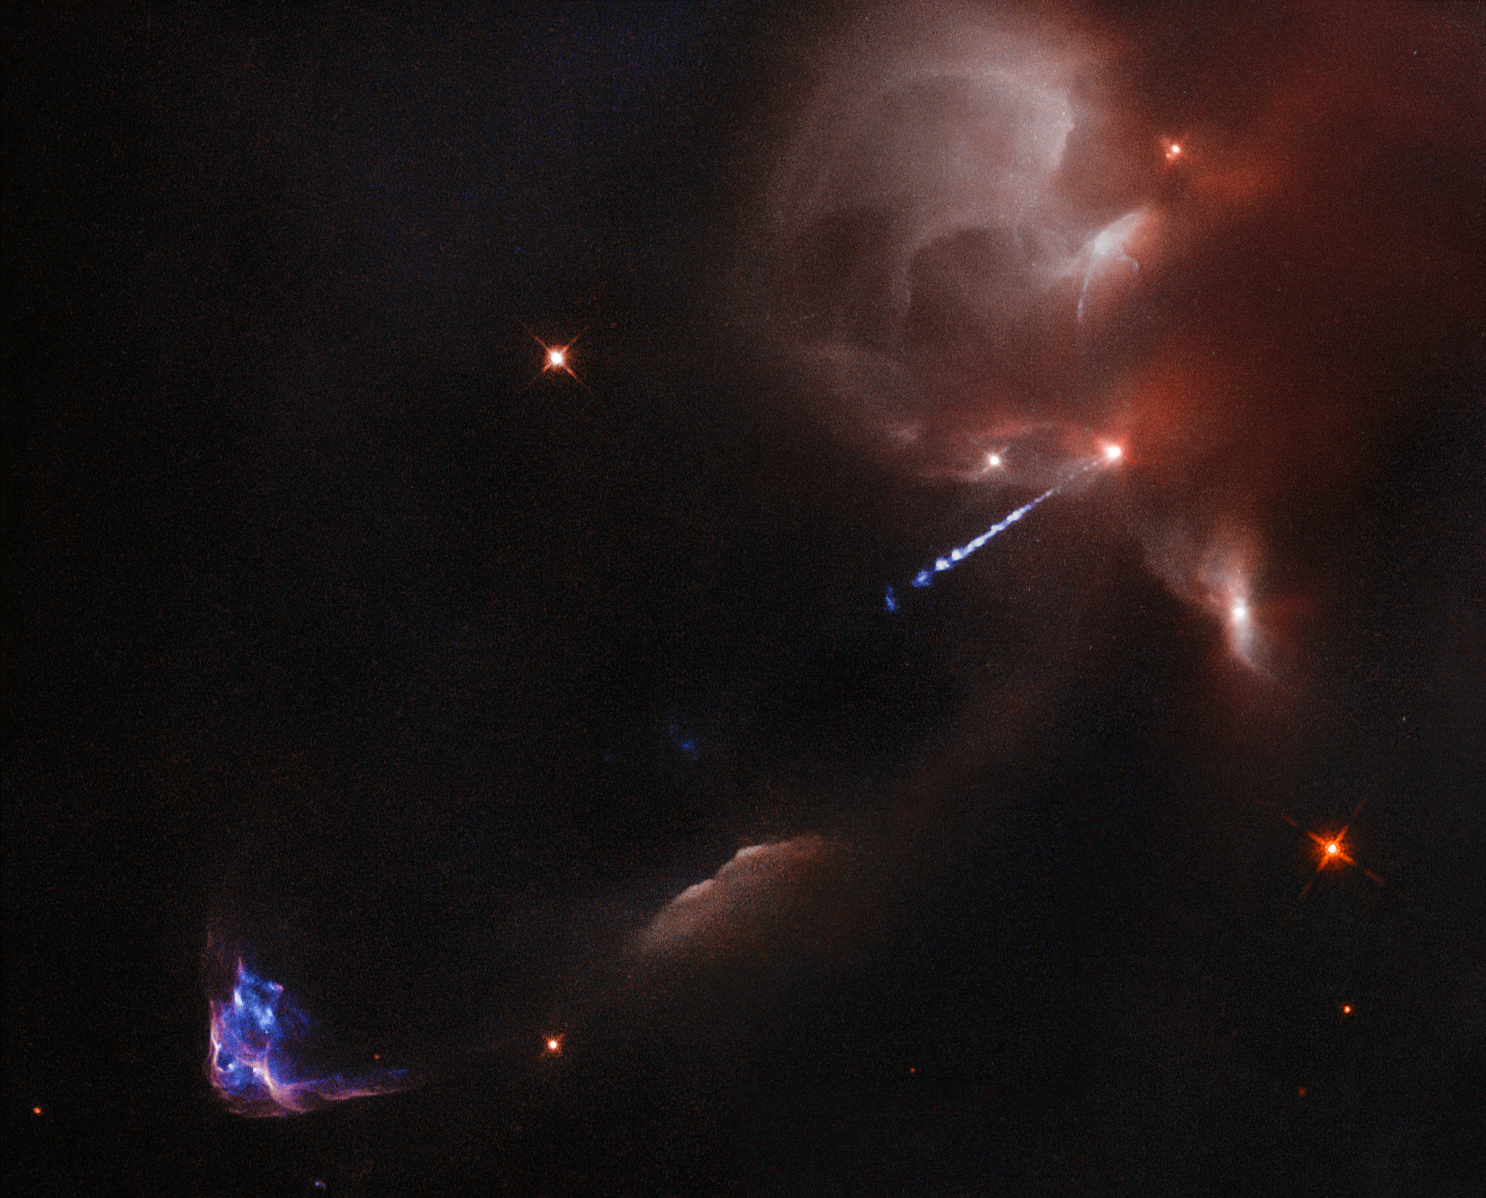

Infant star’s artistic outburst

The artistic outburst of an extremely young star, in the earliest phase of formation, is captured in this spectacular image from the NASA/ESA Hubble Space Telescope. The colourful wisps, found in the lower left of the image, are painted onto the sky by a young star cocooned in the partially illuminated cloud of obscuring dust seen to the upper right.

Pictured punching through the enshrouding dust is an extremely hot, blue jet of gas released by the young star. As this jet speeds through space, it collides with cooler surrounding material. The result is the colourful object to the lower left, produced as the cooler material is heated by the jet (opo9524a, potw1307a).

This wispy object is known as HH34 and it is an example of a Herbig–Haro (HH) object. It resides approximately 1400 light-years away near the Orion Nebula, a large star formation region within the Milky Way. HH objects exist for a cosmically brief time — typically thousands of years — with changes seen in observations taken only a few years apart (heic1113).

Although the jet extends the entire length between the infant star and HH34, only a fraction of it appears visible. This part of the jet possesses an intricate structure of knots and ripples, thought to be caused by the different outbursts catching up and ramming into each other over time.

Credit: ESA/Hubble & NASA